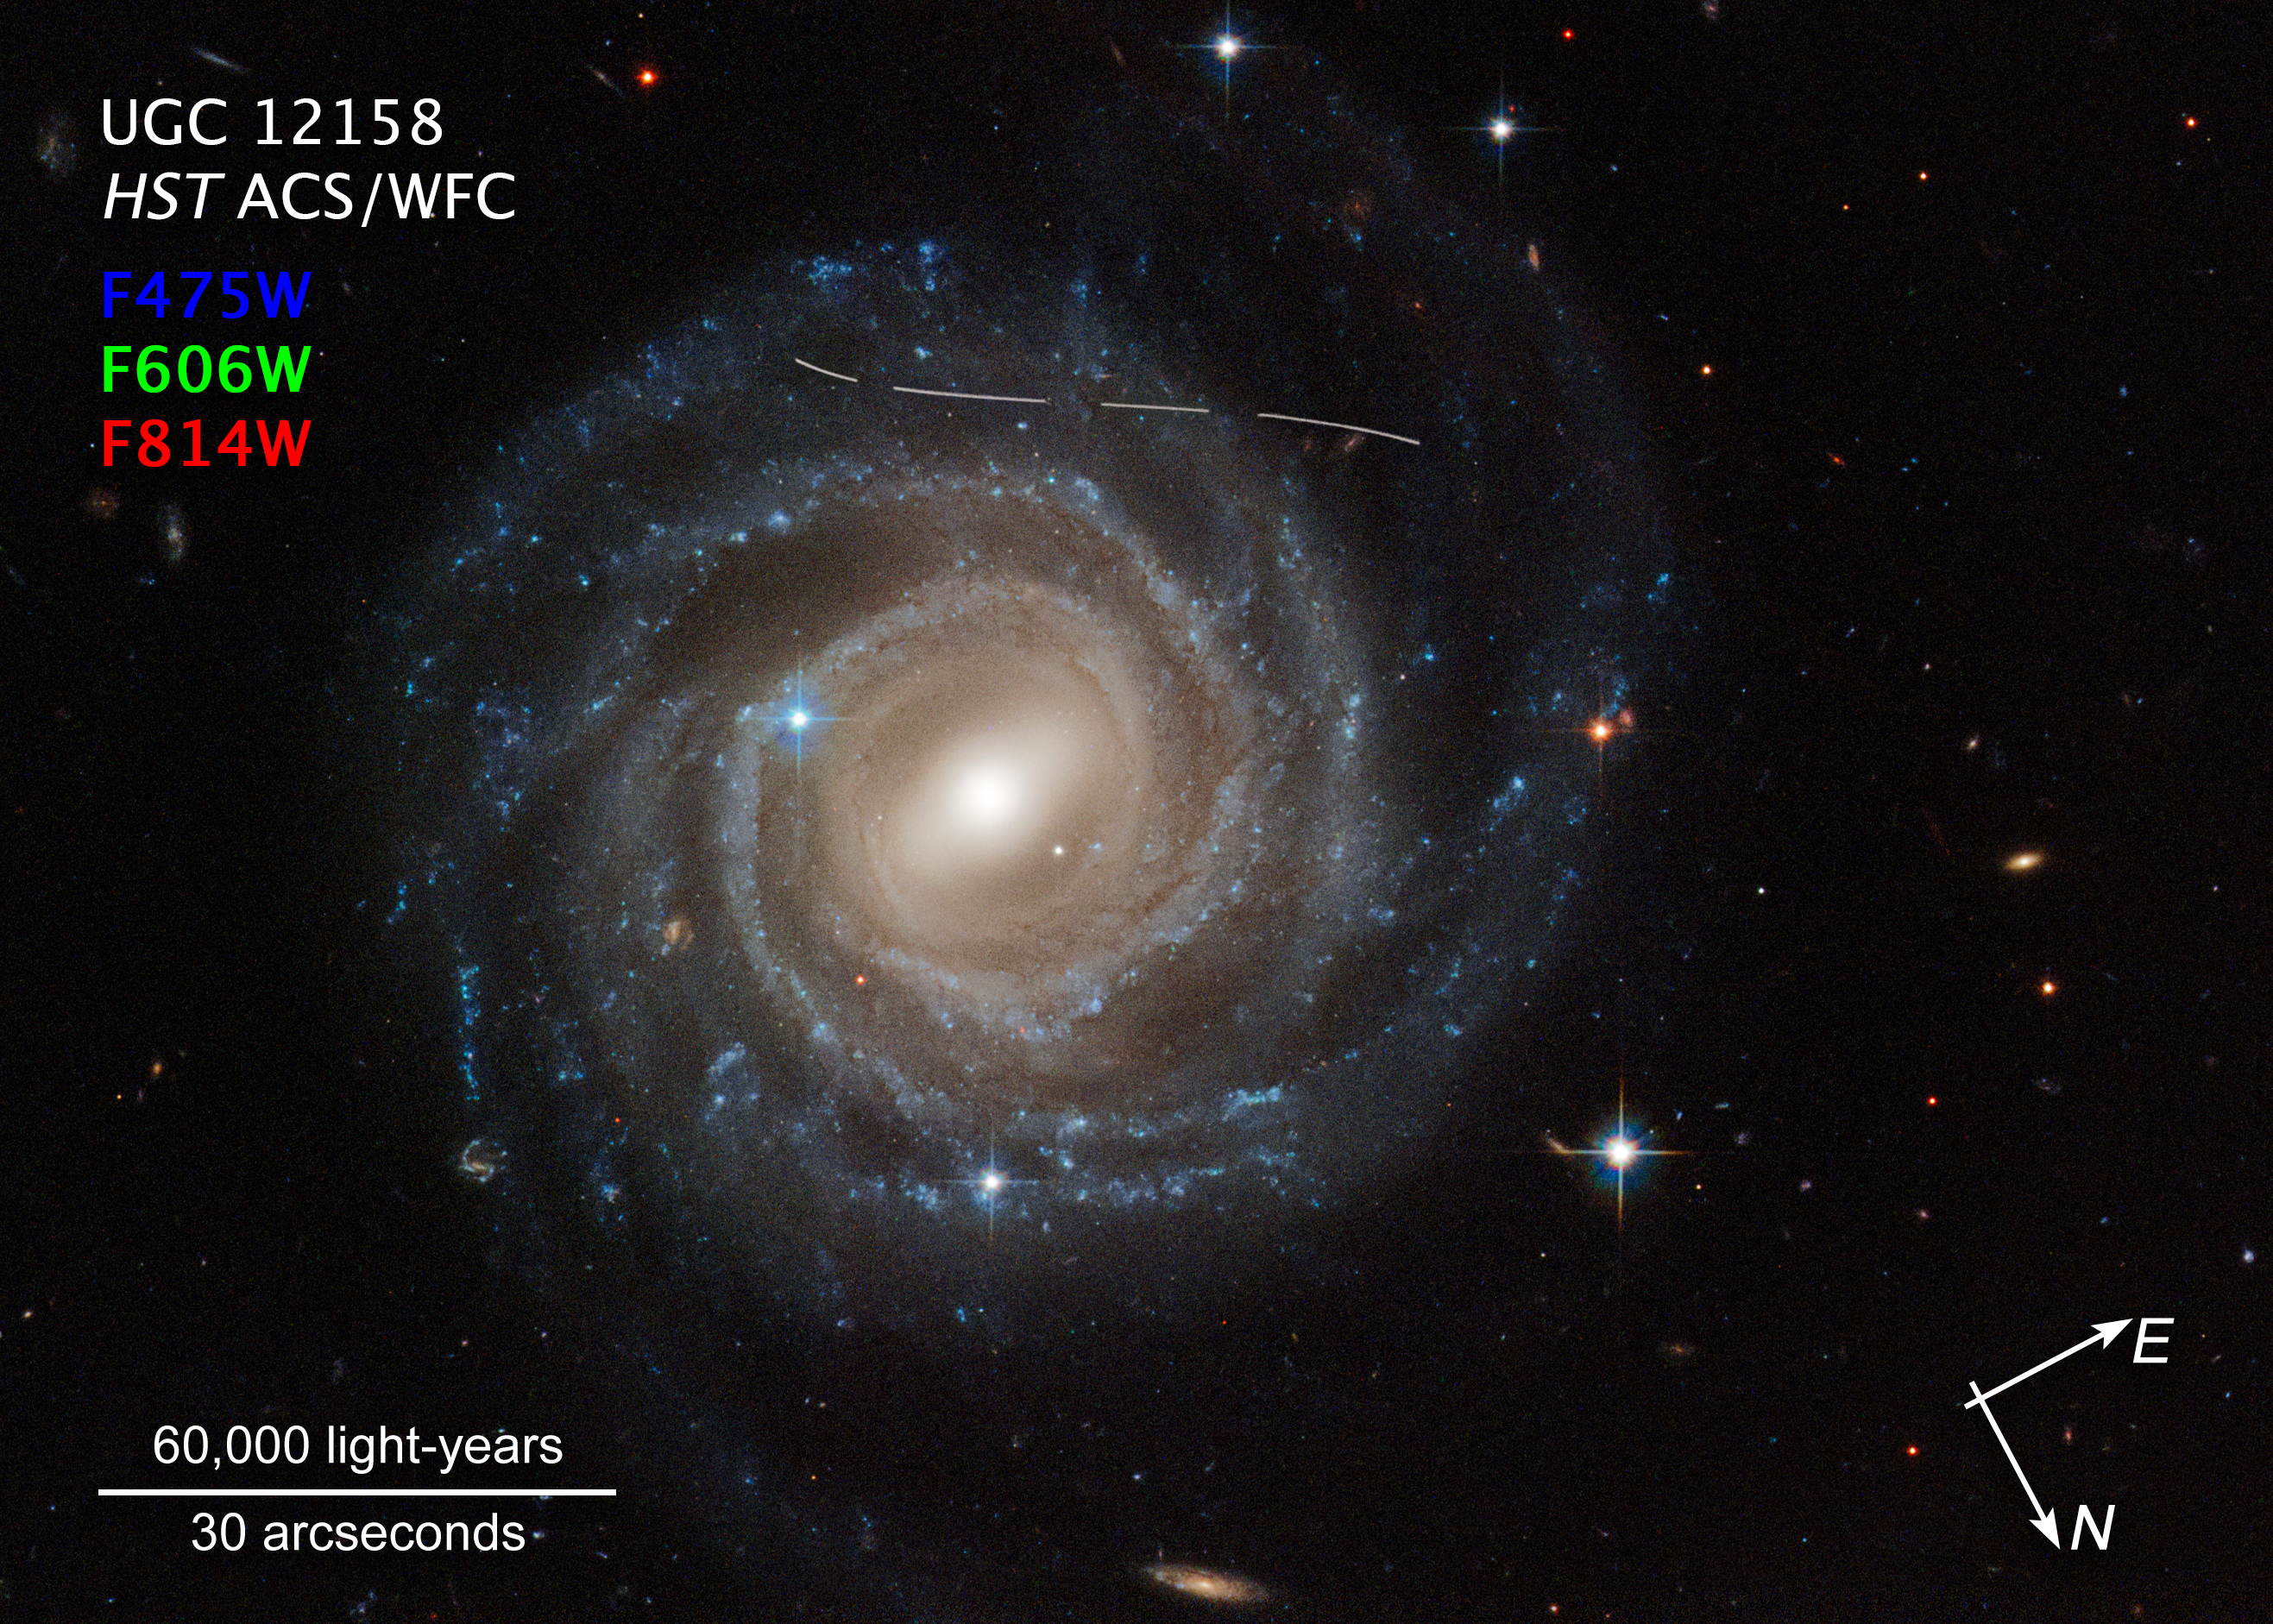

Asteroid photobombs Hubble snapshot of Galaxy UGC 12158 (compass image)

This is an annotated NASA/ESA Hubble Space Telescope image of the barred spiral galaxy UGC 12158, with compass arrows, a scale bar, and colour key for reference. It looks like someone took a white marking pen to it. In reality it is a combination of time exposures of a foreground asteroid moving through Hubble’s field of view, photobombing the observation of the galaxy. Several exposures of the galaxy were taken, which is evidenced by the dashed pattern.

The asteroid appears as a curved trail as a result of parallax: Hubble is not stationary, but orbiting Earth, and this gives the illusion that the faint asteroid is swimming along a curved trajectory. The uncharted asteroid is inside the asteroid belt in our Solar System, and hence is 10 trillion times closer to Hubble than the background galaxy.

Rather than being a nuisance, this type of data is useful to astronomers for doing a census of the asteroid population in our Solar System.

Credit: NASA, ESA, P. G. Martín (Autonomous University of Madrid), J. DePasquale (STScI). Acknowledgment: A. Filippenko (University of California, Berkeley)